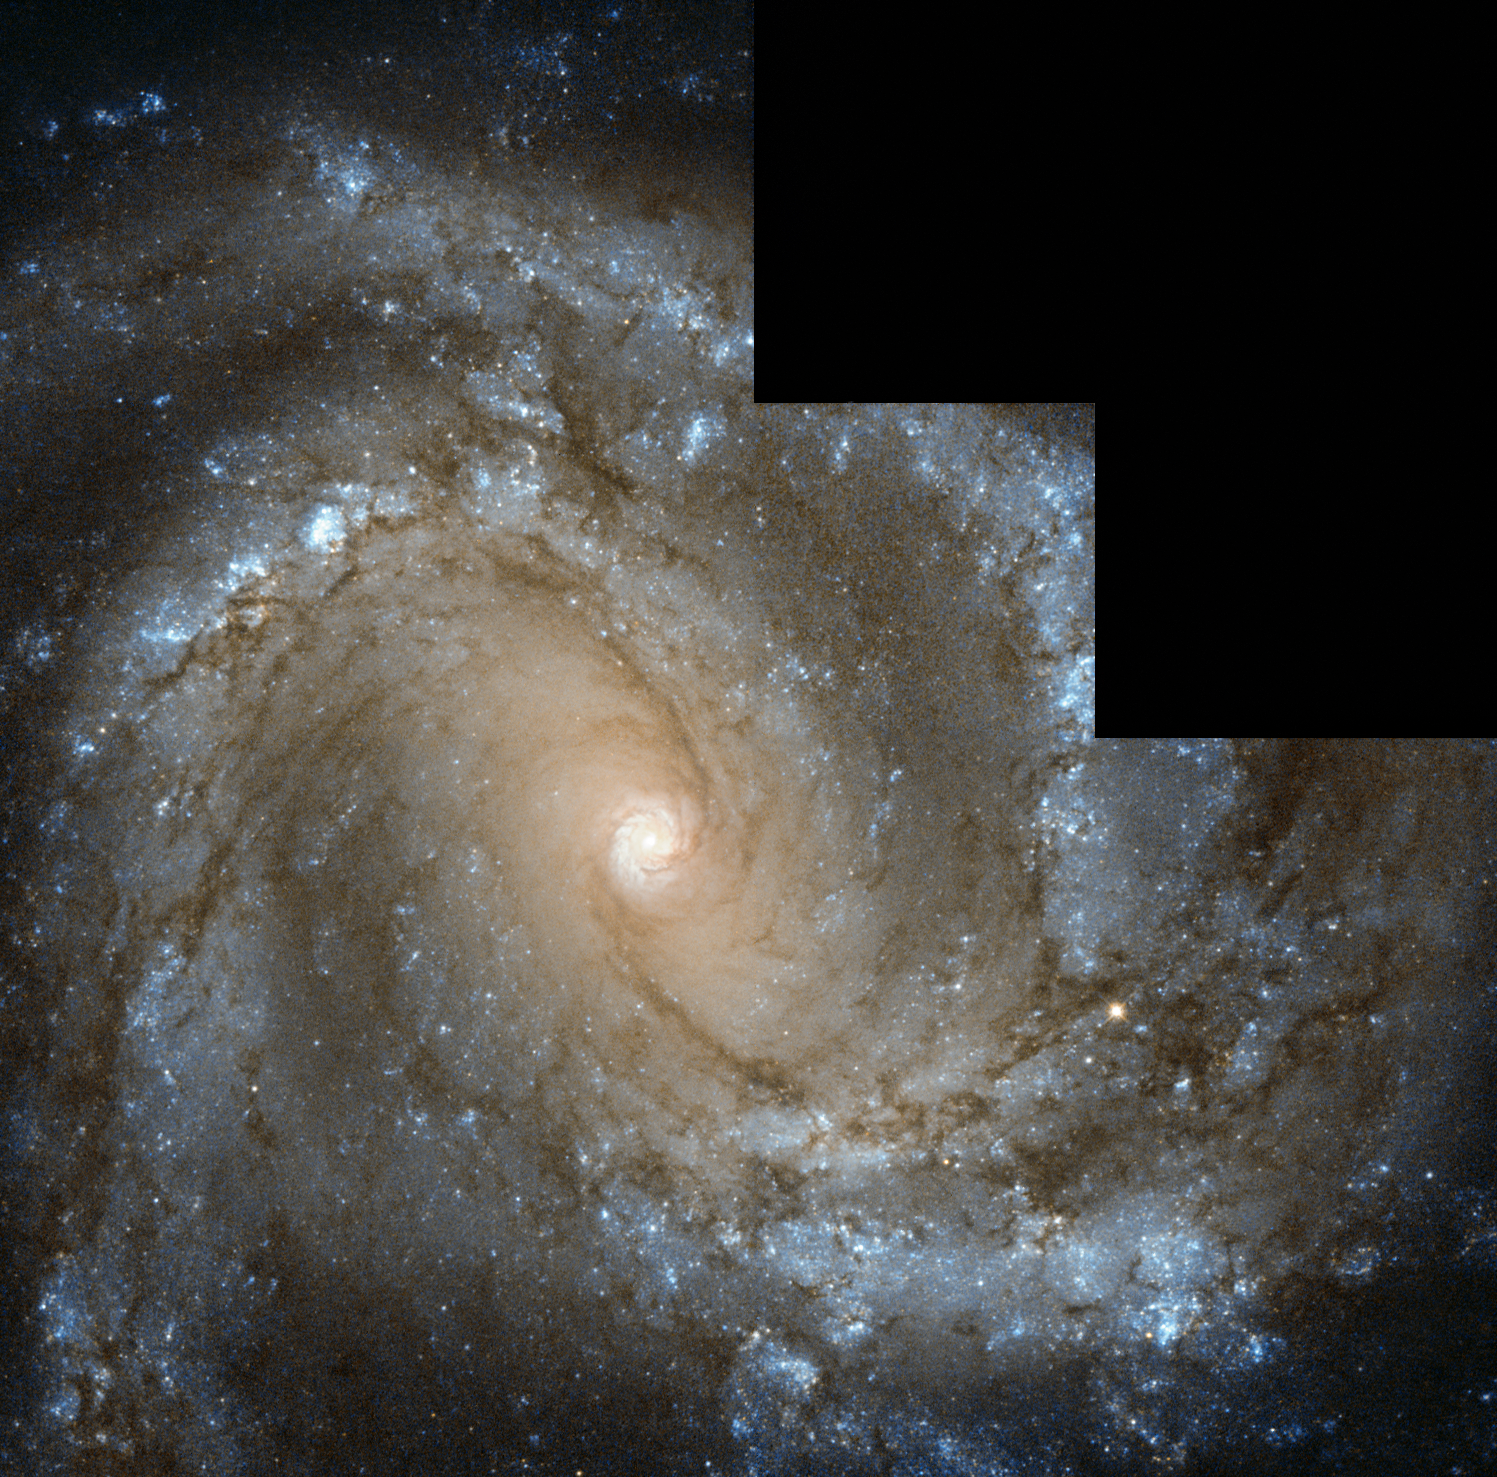

Messier 61 looks straight into the camera

The NASA/ESA Hubble Space Telescope has captured this image of nearby spiral galaxy Messier 61, also known as NGC 4303. The galaxy, located only 55 million light-years away from Earth, is roughly the size of the Milky Way, with a diameter of around 100 000 light-years. The galaxy is notable for one particular reason — six supernovae have been observed within Messier 61, a total that places it in the top handful of galaxies alongside Messier 83, also with six, and NGC 6946, with a grand total of nine observed supernovae.

In this Hubble image the galaxy is seen face-on as if posing for a photograph, allowing us to study its structure closely. The spiral arms can be seen in stunning detail, swirling inwards to the very centre of the galaxy, where they form a smaller, intensely bright spiral. In the outer regions, these vast arms are sprinkled with bright blue regions where new stars are being formed from hot, dense clouds of gas.

Messier 61 is part of the Virgo Galaxy Cluster, a massive group of galaxies in the constellation of Virgo (the Virgin). Galaxy clusters, or groups of galaxies, are among the biggest structures in the Universe to be held together by gravity alone. The Virgo Cluster contains more than 1300 galaxies and forms the central region of the Local Supercluster, an even bigger gathering of galaxies.

The image was taken using data from Hubble’s Wide Field Camera 2. Different versions of this image were submitted to the Hubble’s Hidden Treasures image processing competition by contestants Gilles Chapdelaine, Luca Limatola, and Robert Gendler.

Credit: ESA/Hubble & NASA Acknowledgements: G. Chapdelaine, L. Limatola, and R. Gendler.